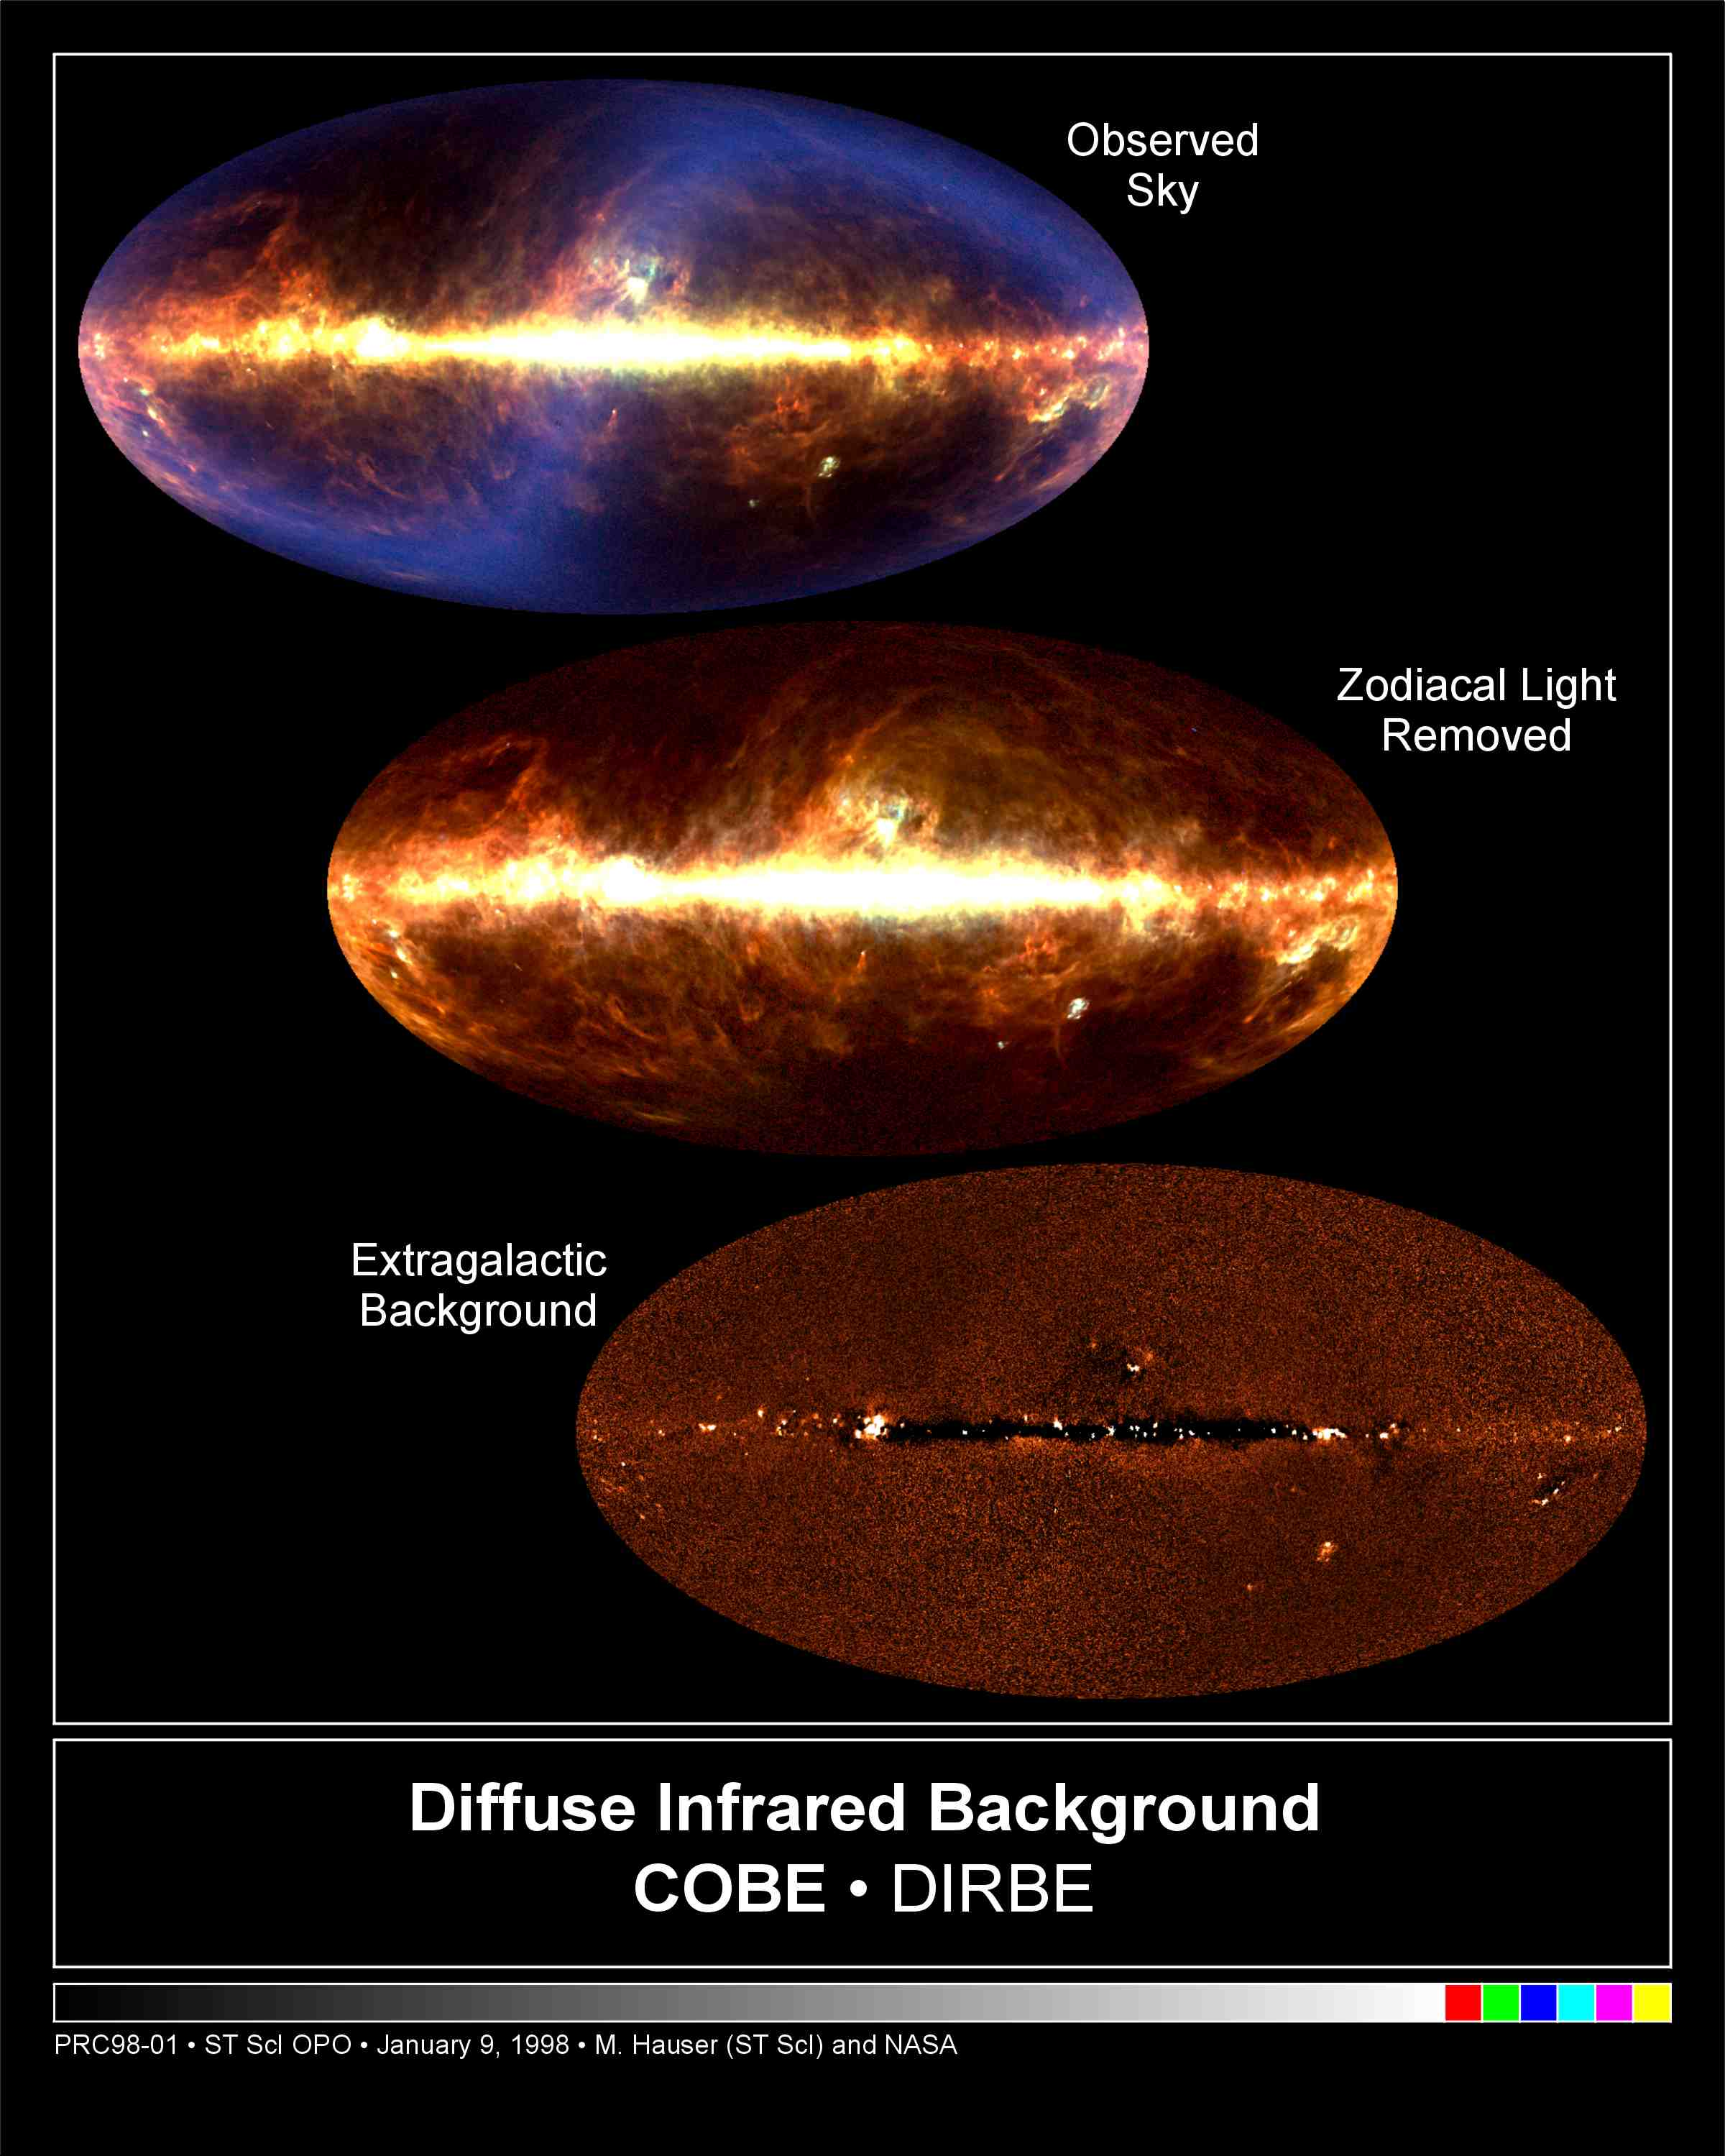

COBE's infrared view of the Universe

These three pictures are maps of the full sky as seen in infrared light. The top two are composite images taken in wavelengths of 60, 100, and 240 micrometers. The 60-micrometer brightness is shown in blue, the 100-micrometer brightness in green, and the 240-micrometer brightness in red. The bottom image shows just the 240-micrometer brightness after foreground light from the solar system and Galaxy has been removed.

The images were compiled from data taken between December 1989 and September 1990 by the Diffuse Infrared Background Experiment (DIRBE) on board NASA's Cosmic Background Explorer (COBE). They illustrate the steps scientists used to find the cosmic infrared background, which is a radiative fossil containing cumulative starlight which now appears in the infrared due to the cosmic redshift and by absorption and re-emission by dust in the universe since the Big Bang.

Credit: Michael Hauser (STScI), the COBE/DIRBE Science Team, and NASA/ESA